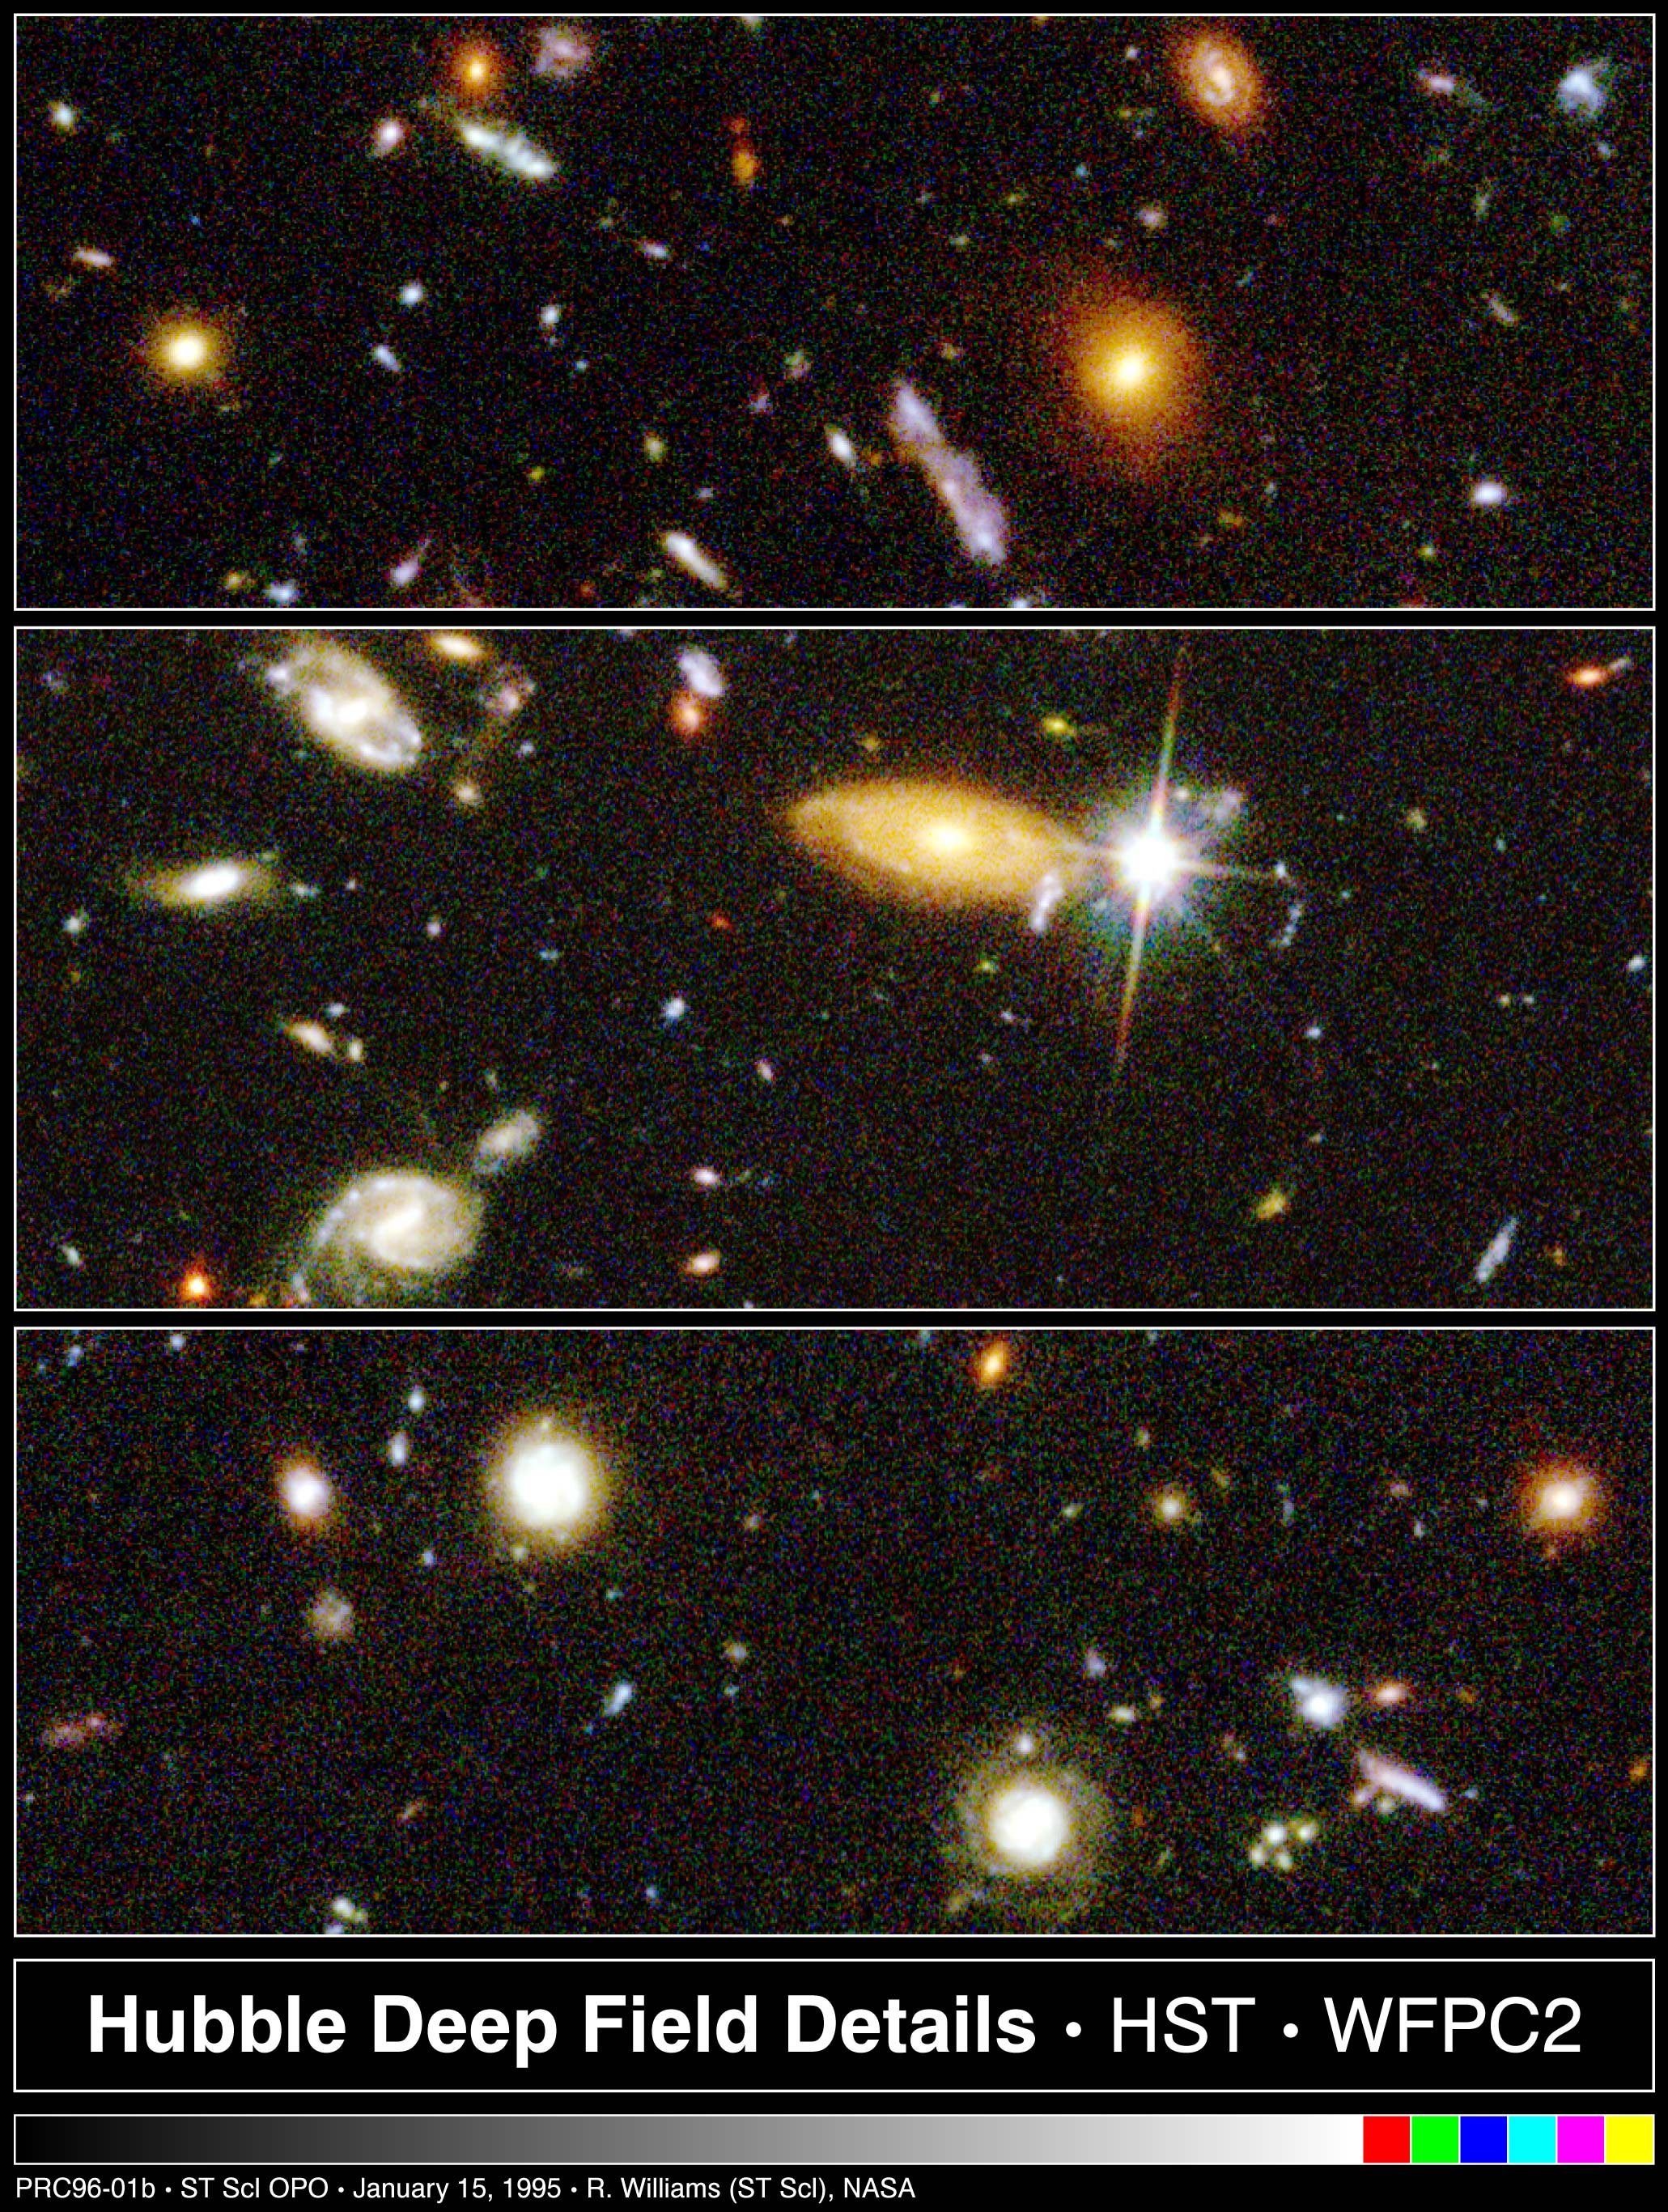

Hubble Deep Field details

These three images represent select portions of the sky as seen in the Hubble Deep Field observation -- the 'deepest-ever' view of the universe, made with the Hubble Space Telescope.

Credit: Robert Williams and the Hubble Deep Field Team (STScI) and NASA/ESA